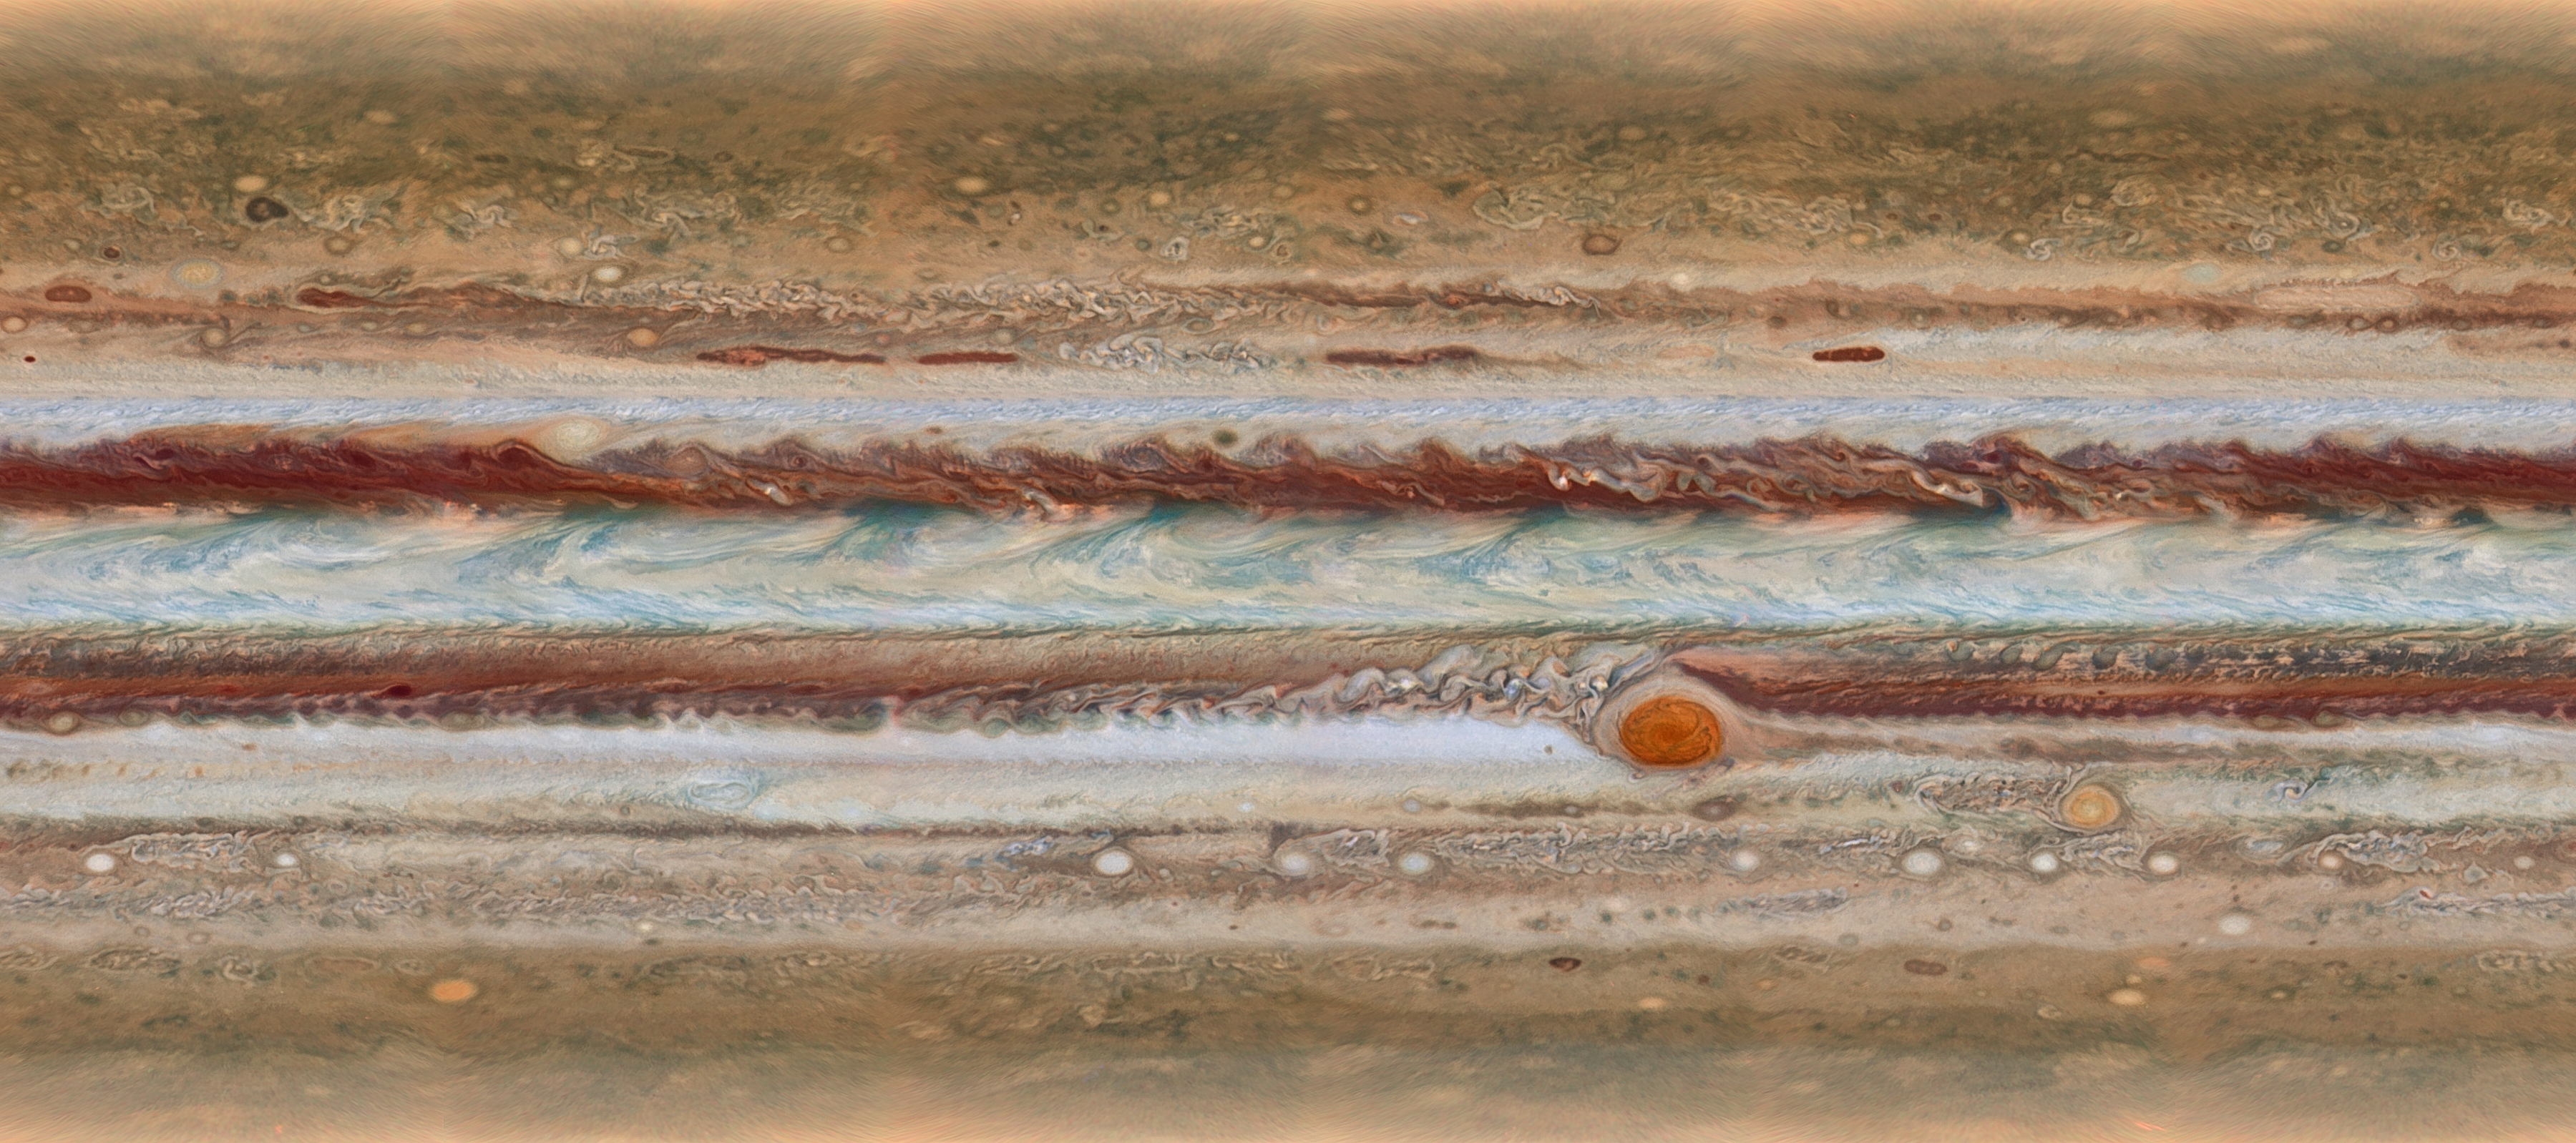

Jupiter at a glance

This new image from the largest planet in the Solar System, Jupiter, was made during the Outer Planet Atmospheres Legacy (OPAL) programme. The images from this programme make it possible to determine the speeds of Jupiter’s winds, to identify different phenomena in its atmosphere and to track changes in its most famous features.

The map shown was observed on 19 January 2015, from 15:00 UT to 23:40 UT.

Credit: NASA, ESA, A. Simon (GSFC), M. Wong (UC Berkeley), and G. Orton (JPL-Caltech)